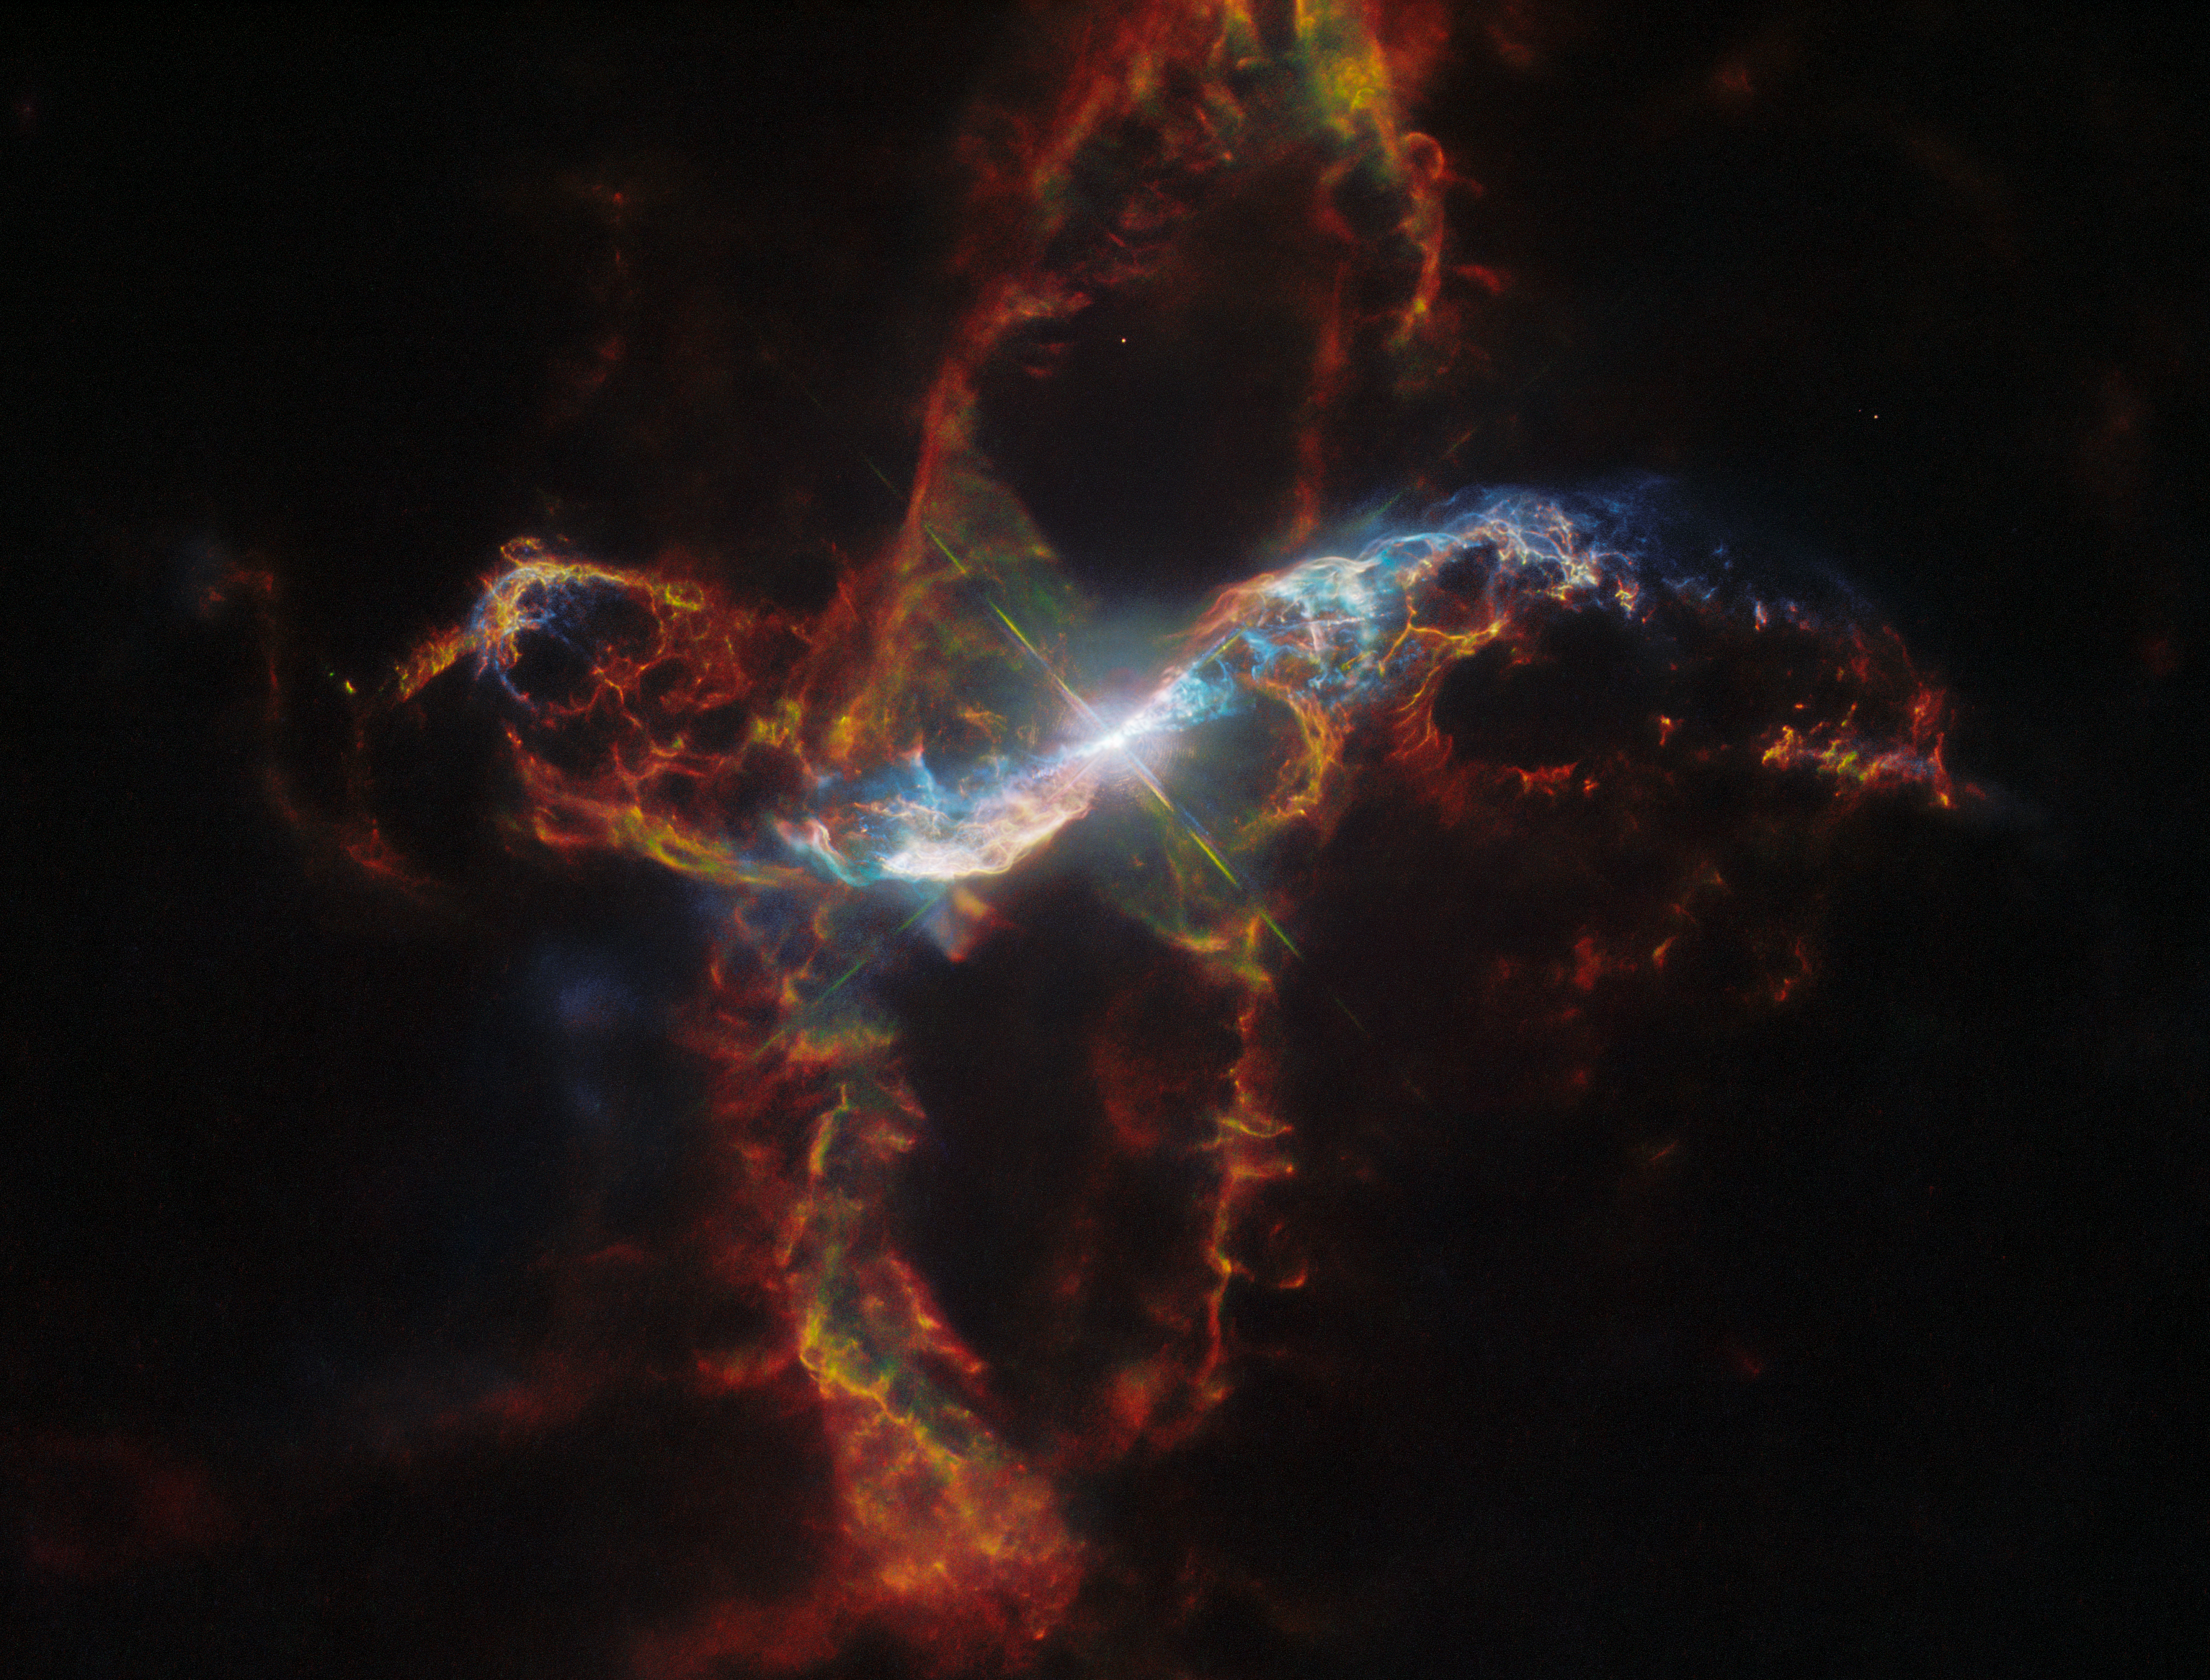

R Aquarii

This image features R Aquarii, a symbiotic binary star that lies only roughly 1,000 light-years from Earth in the constellation Aquarius. This is a type of binary star system consisting of a white dwarf and a red giant that is surrounded by a large, dynamic nebula.

Credit: NASA, ESA, M. Stute, M. Karovska, D. de Martin & M. Zamani (ESA/Hubble)